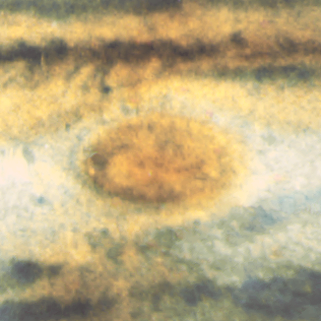

Jupiter's Great Red Spot

When 17th-century astronomers first turned their telescopes to Jupiter, they noted a conspicuous reddish spot on the giant planet. This Great Red Spot is still present in Jupiter's atmosphere, more than 300 years later. It is now known that it is a vast storm, spinning like a cyclone. Unlike a low-pressure hurricane in the Caribbean Sea, however, the Red Spot rotates in a counterclockwise direction in the southern hemisphere, showing that it is a high-pressure system. Winds inside this Jovian storm reach speeds of about 270 mph.

Credit: Hubble Heritage Team (STScI/AURA/NASA/ESA) and Amy Simon (Cornell U.)